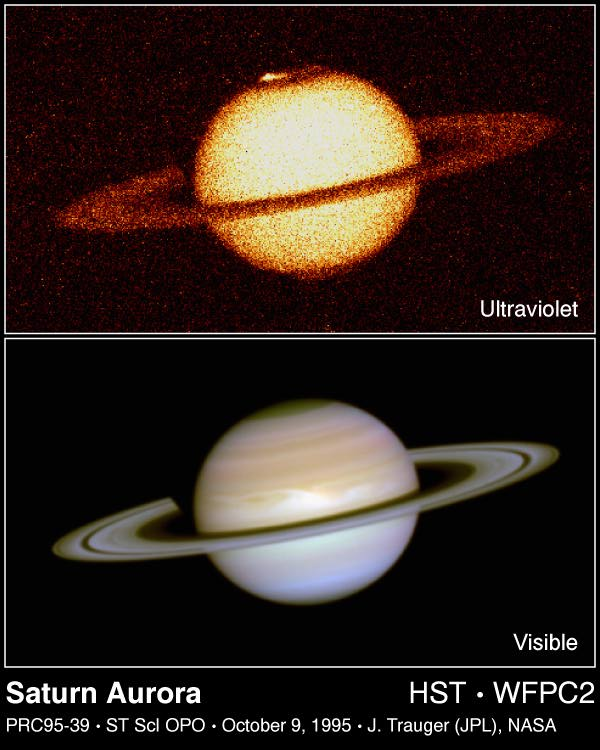

The Aurorae on Saturn

Top Panel

This is the first image ever taken of bright aurorae at Saturn's northern and southern poles, as seen in far ultraviolet light by the Wide Field and Planetary Camera 2aboard the Hubble Space Telescope.

Bottom Panel

For comparison, this is a visible-light colour composite image of Saturn as seen by Hubble on December 1, 1994. Unlike the ultraviolet image, Saturn's familiar atmospheric belts and zones are clearly seen. The lower cloud deck is not visible at UV wavelengths because sunlight is reflected from higher in the atmosphere.

Credit: J.T. Trauger (JPL), J.T. Clarke (Univ. of Michigan), the WFPC2science team, and NASA/ESA